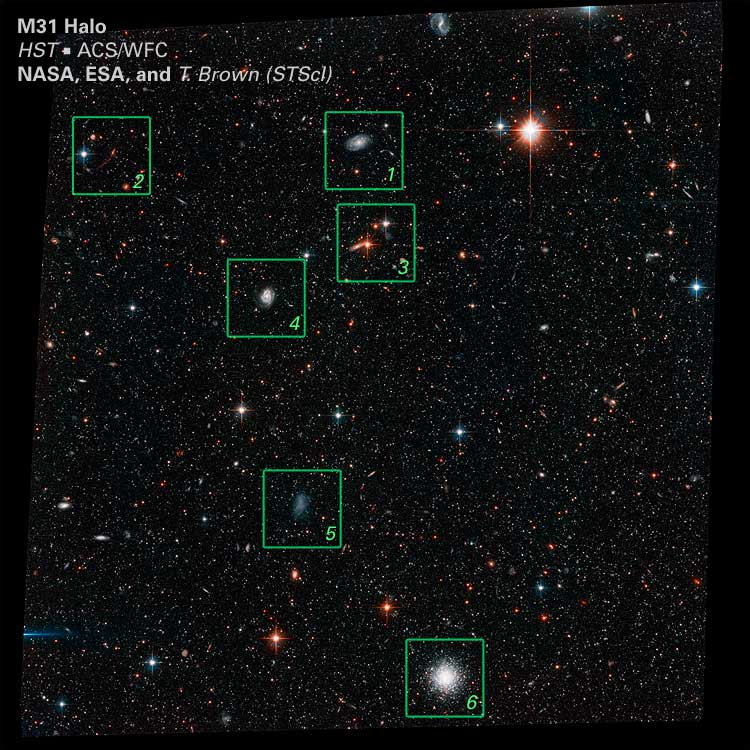

Location of Details in ACS Image

This image shows the location of 6 different detailed areas in the ACS (Advanced Camera for Surveys) image of the Andromeda Galaxy.

Credit: NASA, ESA and T.M. Brown (STScI)